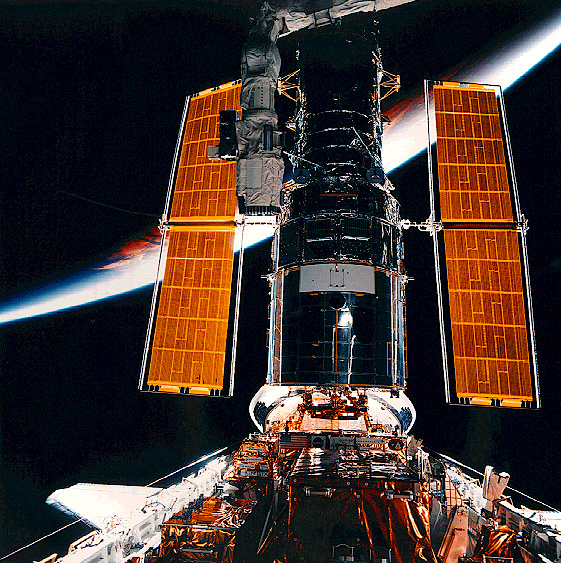

SM2: Hubble About to Perform a Backdrop

In the Space Shuttle Discovery's cargo bay, the Hubble Space Telescope (HST) is backdropped against Earth's limb and atmosphere following its servicing by astronauts and prior to its release.

Credit: NASA/ESA